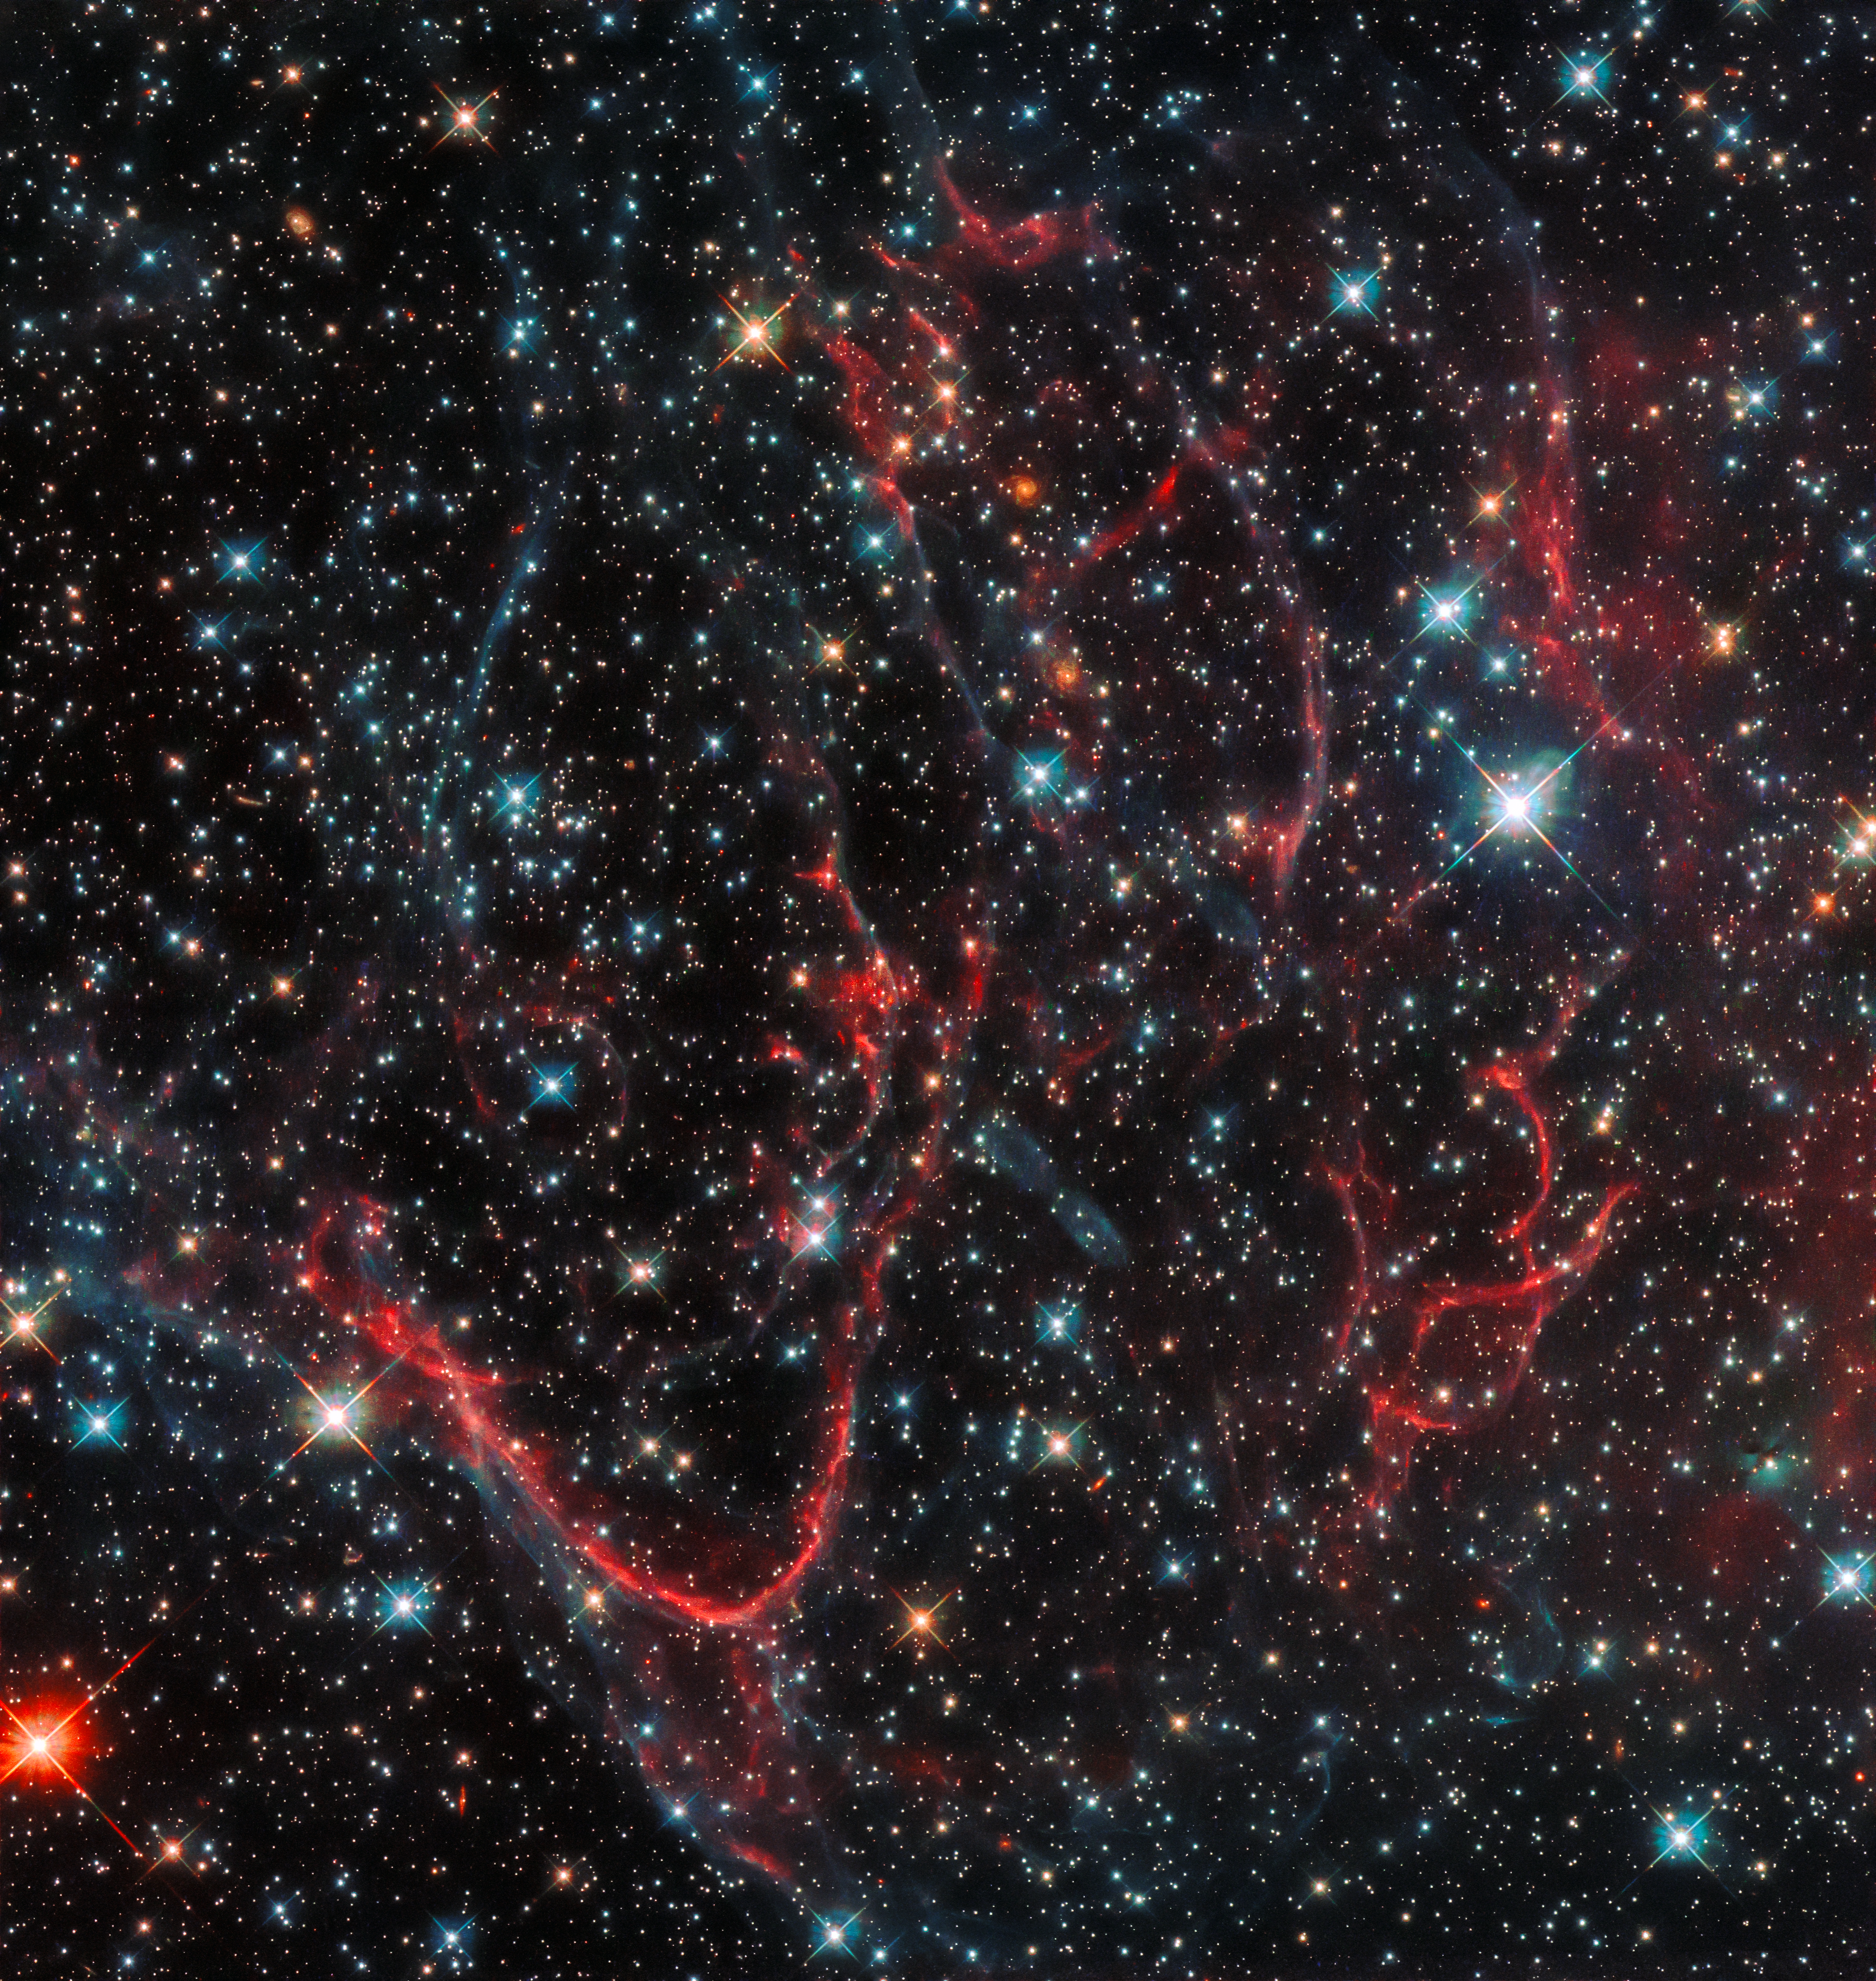

Tangled — cosmic edition

This dark, tangled web is an object named SNR 0454-67.2. It formed in a very violent fashion — it is a supernova remnant, created after a massive star ended its life in a cataclysmic explosion and threw its constituent material out into surrounding space. This created the messy formation we see in this NASA/ESA Hubble Space Telescope image, with threads of red snaking amidst dark, turbulent clouds.

SNR 0454-67.2 is situated in the Large Magellanic Cloud, a dwarf spiral galaxy that lies close to the Milky Way. The remnant is likely the result of a Type Ia supernova explosion; this category of supernovae is formed from the death of a white dwarf star, which grows and grows by siphoning material from a stellar companion until it reaches a critical mass and then explodes.

As they always form via a specific mechanism — when the white dwarf hits a particular mass — these explosions always have a well-known luminosity, and are thus used as markers (standard candles) for scientists to obtain and measure distances throughout the Universe.

Credit: ESA/Hubble, NASA